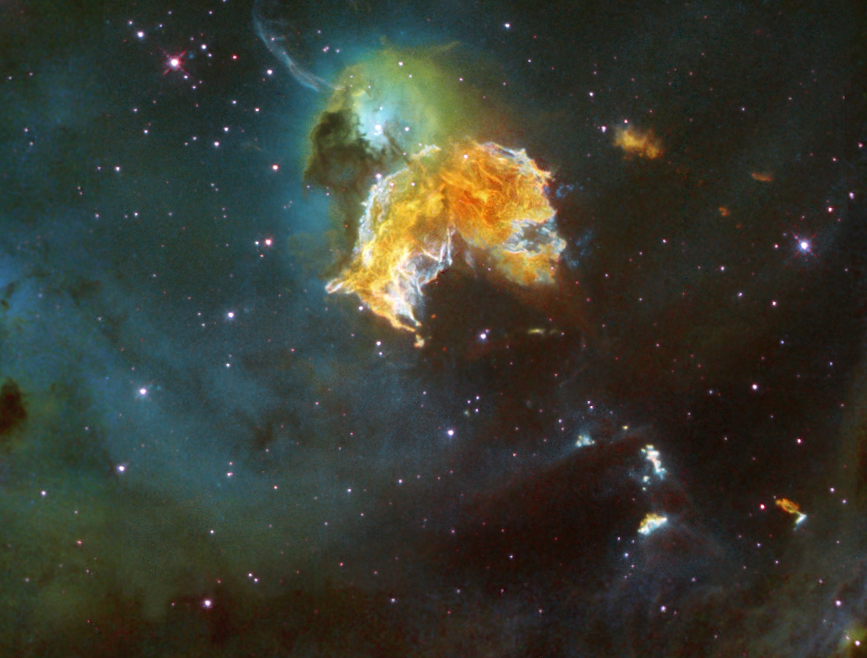

Supernova remnant menagerie

A violent and chaotic-looking mass of gas and dust is seen in this Hubble Space Telescope image of a nearby supernova remnant. Denoted N 63A, the object is the remains of a massive star that exploded, spewing its gaseous layers out into an already turbulent region.

Credit: NASA, ESA, HEIC, and the Hubble Heritage Team (STScI/AURA). Acknowledgment: Y.-H. Chu and R. M. Williams (UIUC).